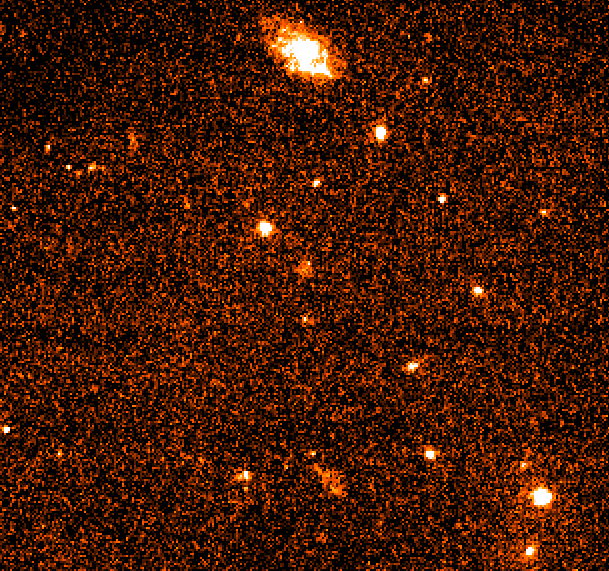

Gamma Ray Burst 970228

A Hubble Space Telescope image of the fading fireball from one of the universe's most mysterious phenomena, a gamma-ray burst.

Though the visible component has faded to 1/500th its brightness (27.7 magnitude) from the time it was first discovered by ground- based telescopes last March (the actual gamma-ray burst took place on February 28), Hubble continues to clearly see the fireball and discriminated a surrounding nebulosity (at 25th magnitude) which is considered a host galaxy.

Credit: Andrew Fruchter (STScI), Elena Pian (ITSRE-CNR), and NASA/ESA